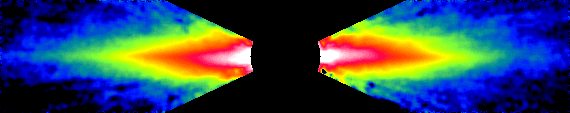

Warped Disc around Beta Pictoris

False-color is applied through image processing to accentuate details in the disk structure. Hubble reveals that the pink-white inner edge of the disk is slightly tilted from the plane of the outer disk (red-yellow-green) as identified by a dotted line.

Credit: Chris Burrows, Space Telescope Science Institute (STScI) the European Space Agency (ESA), J. Krist (STScI), the WFPC2 IDT team, and NASA